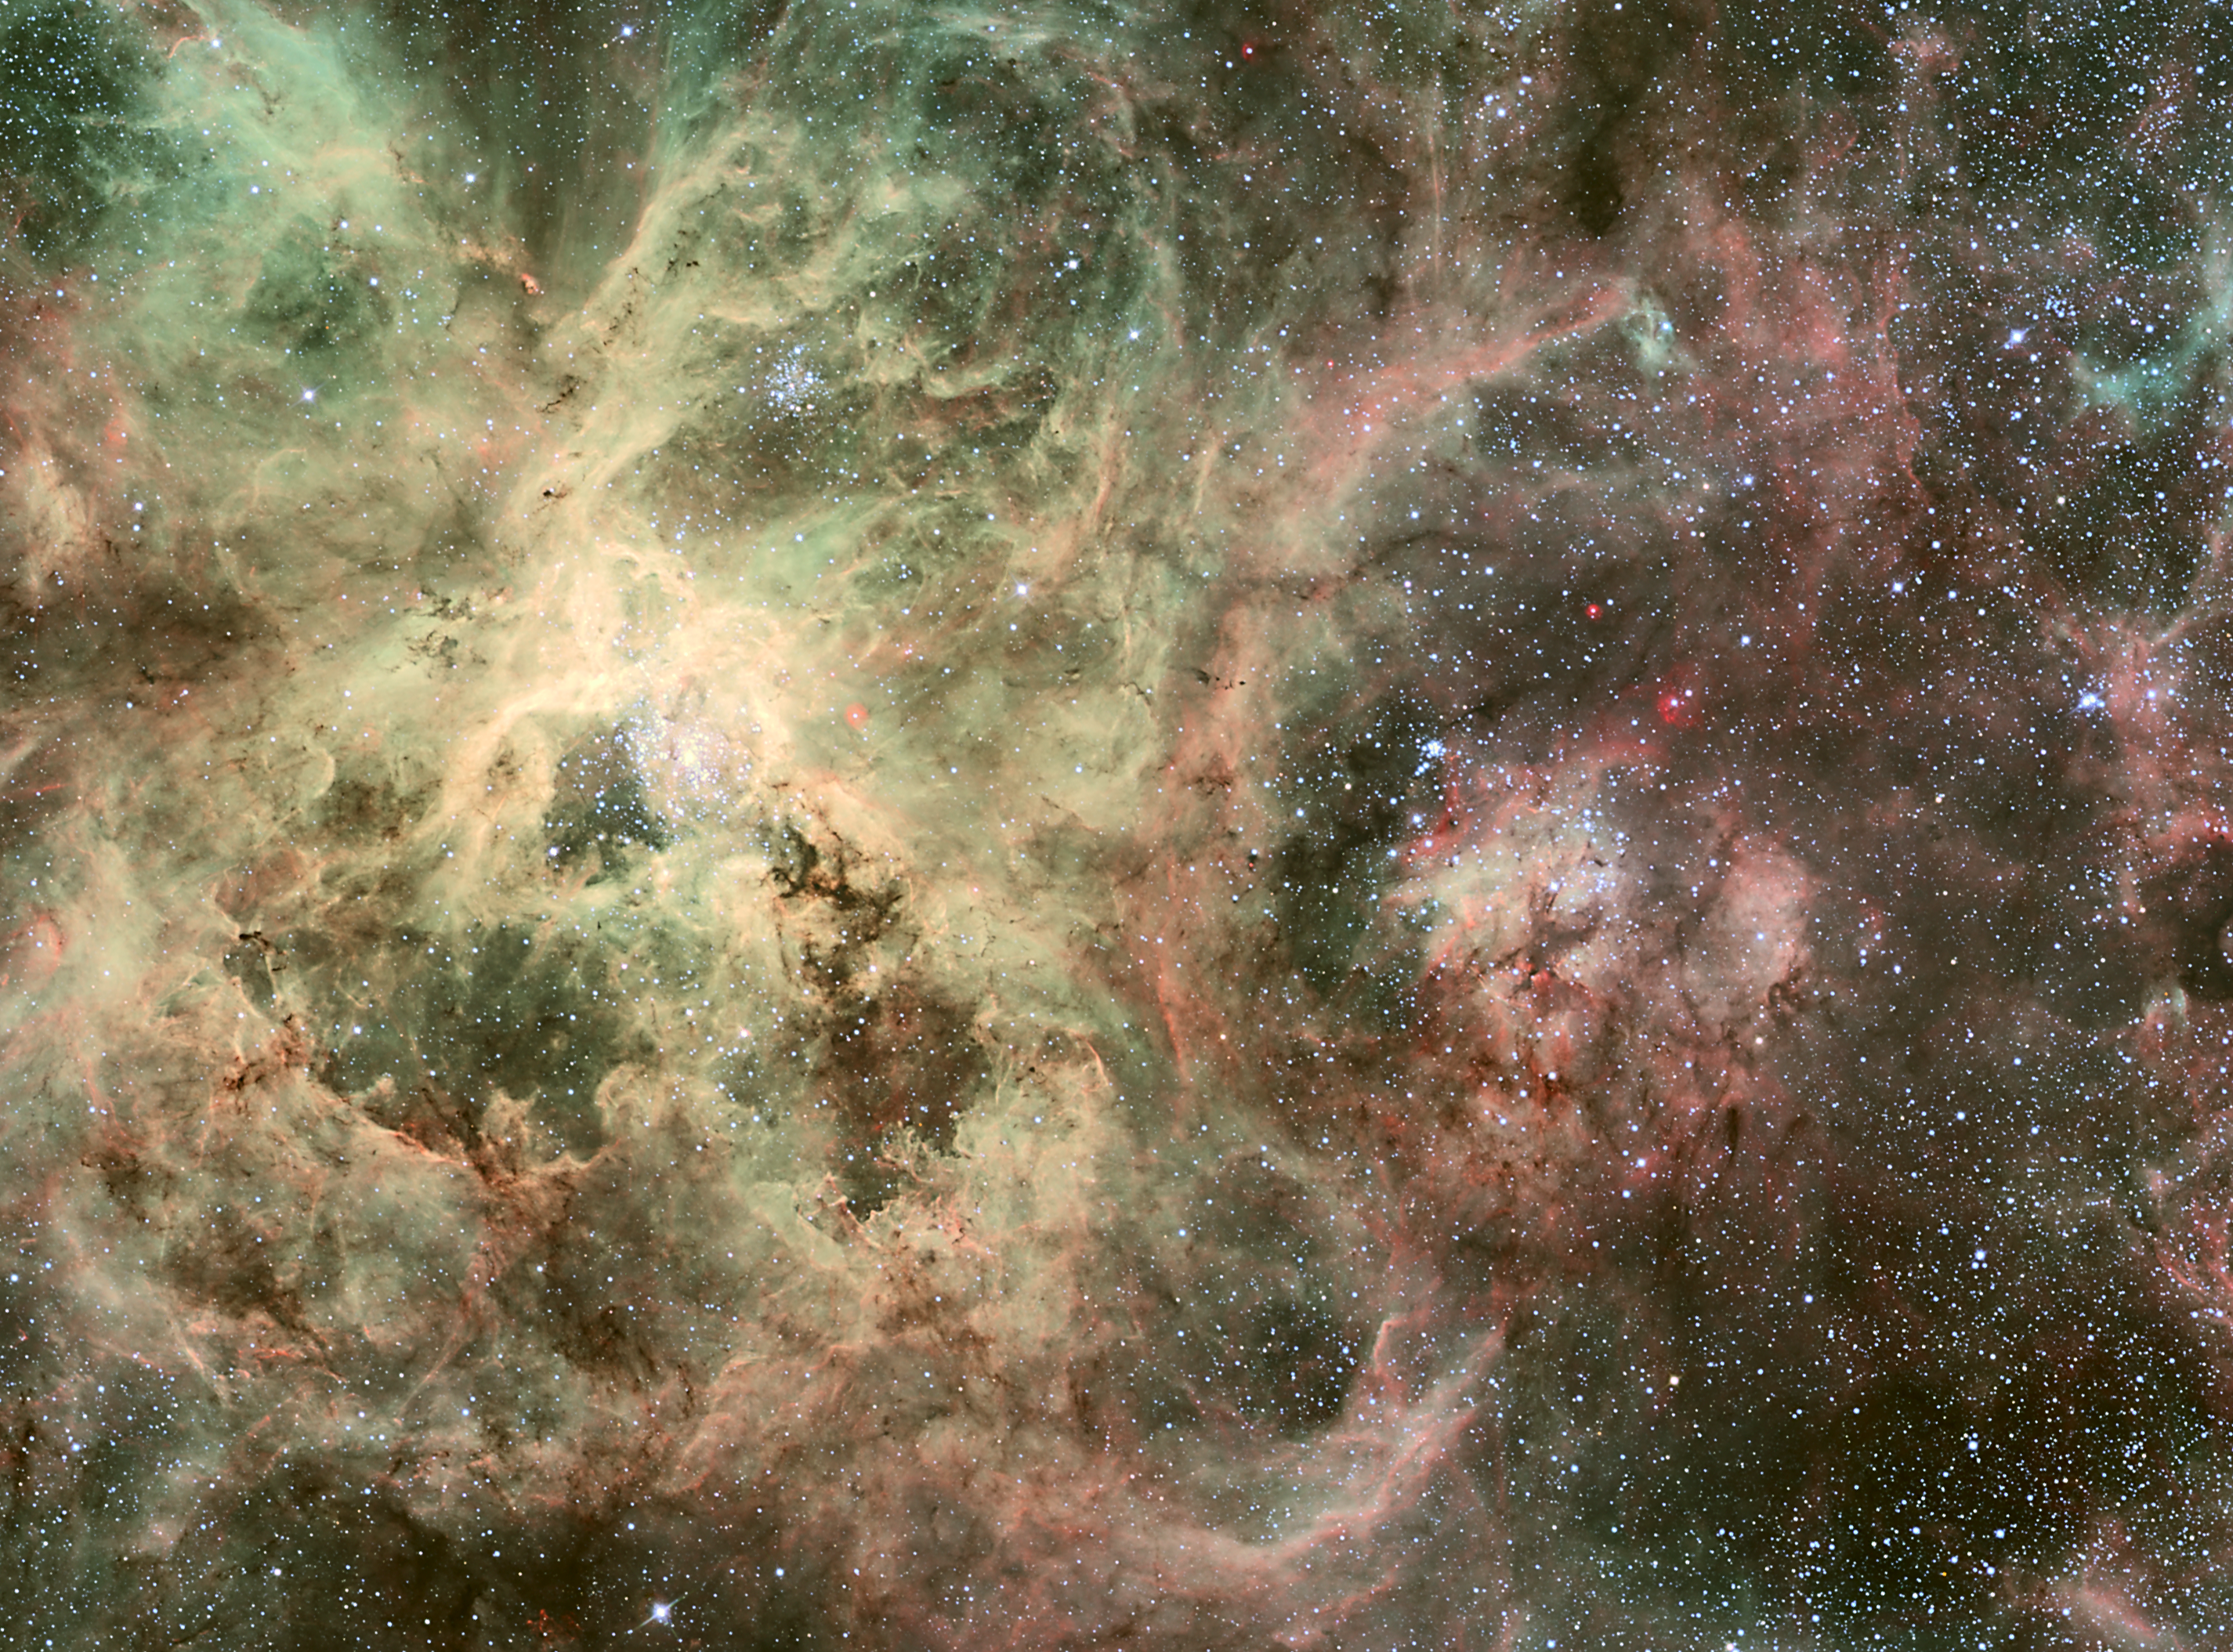

Homeless star in 30 Doradus (ground-based image)

Within this image is the runaway heavyweight star, called 30 Dor #016. It is 90 times more massive than the Sun and is travelling at more than 400 000 kilometres an hour from its home.

The young star, only one million to two million years old, may have travelled about 375 light-years from its suspected home in bright star cluster R136. Nestled in the core of 30 Doradus, R136 is one of the most massive young star clusters in nearby galaxies, containing several stars topping 100 solar masses each. 30 Doradus, also called the Tarantula Nebula, resides roughly 170 000 light-years from Earth, in the Large Magellanic Cloud.

The image was taken with the Wide Field Imager (WFI) camera on the MPG/ESO 2.2-metre telescope at the La Silla Observatory.

Credit: ESO Acknowledgments: J. Alves (Calar Alto, Spain), B. Vandame, and Y. Beletski (ESO)Processing by B. Fosbury (ST-ECF)